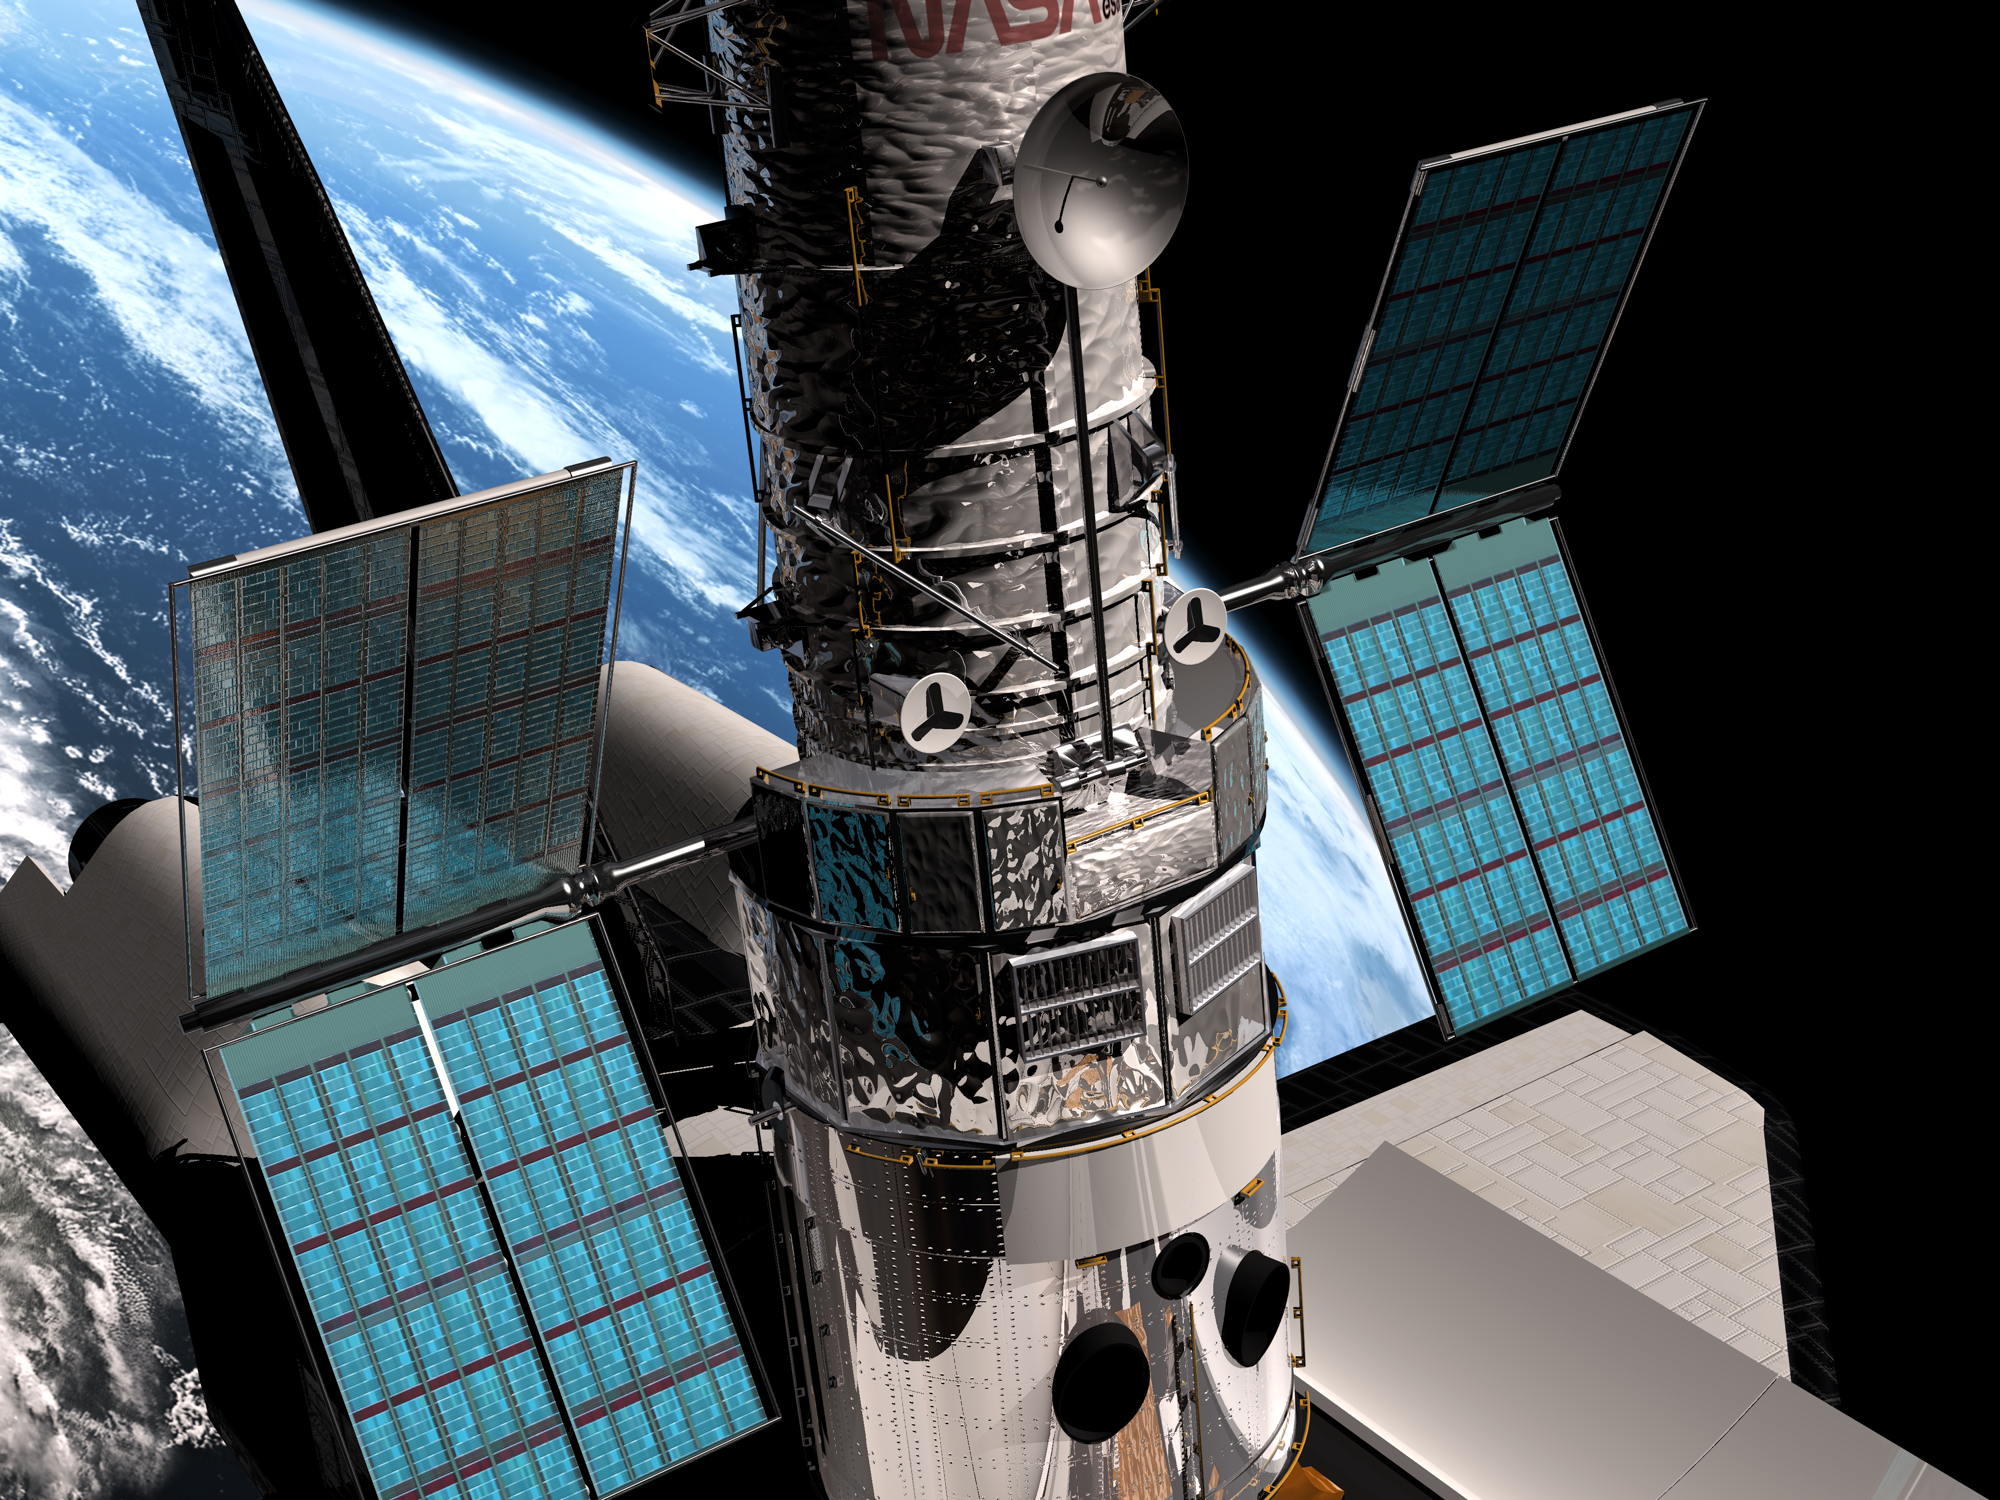

SM3B - Hubble's solar panels unfolding

This artist's impression shows Hubble's new Solar Panels unfolding during Servicing Mission 3B in 2002.

Credit: European Space Agency